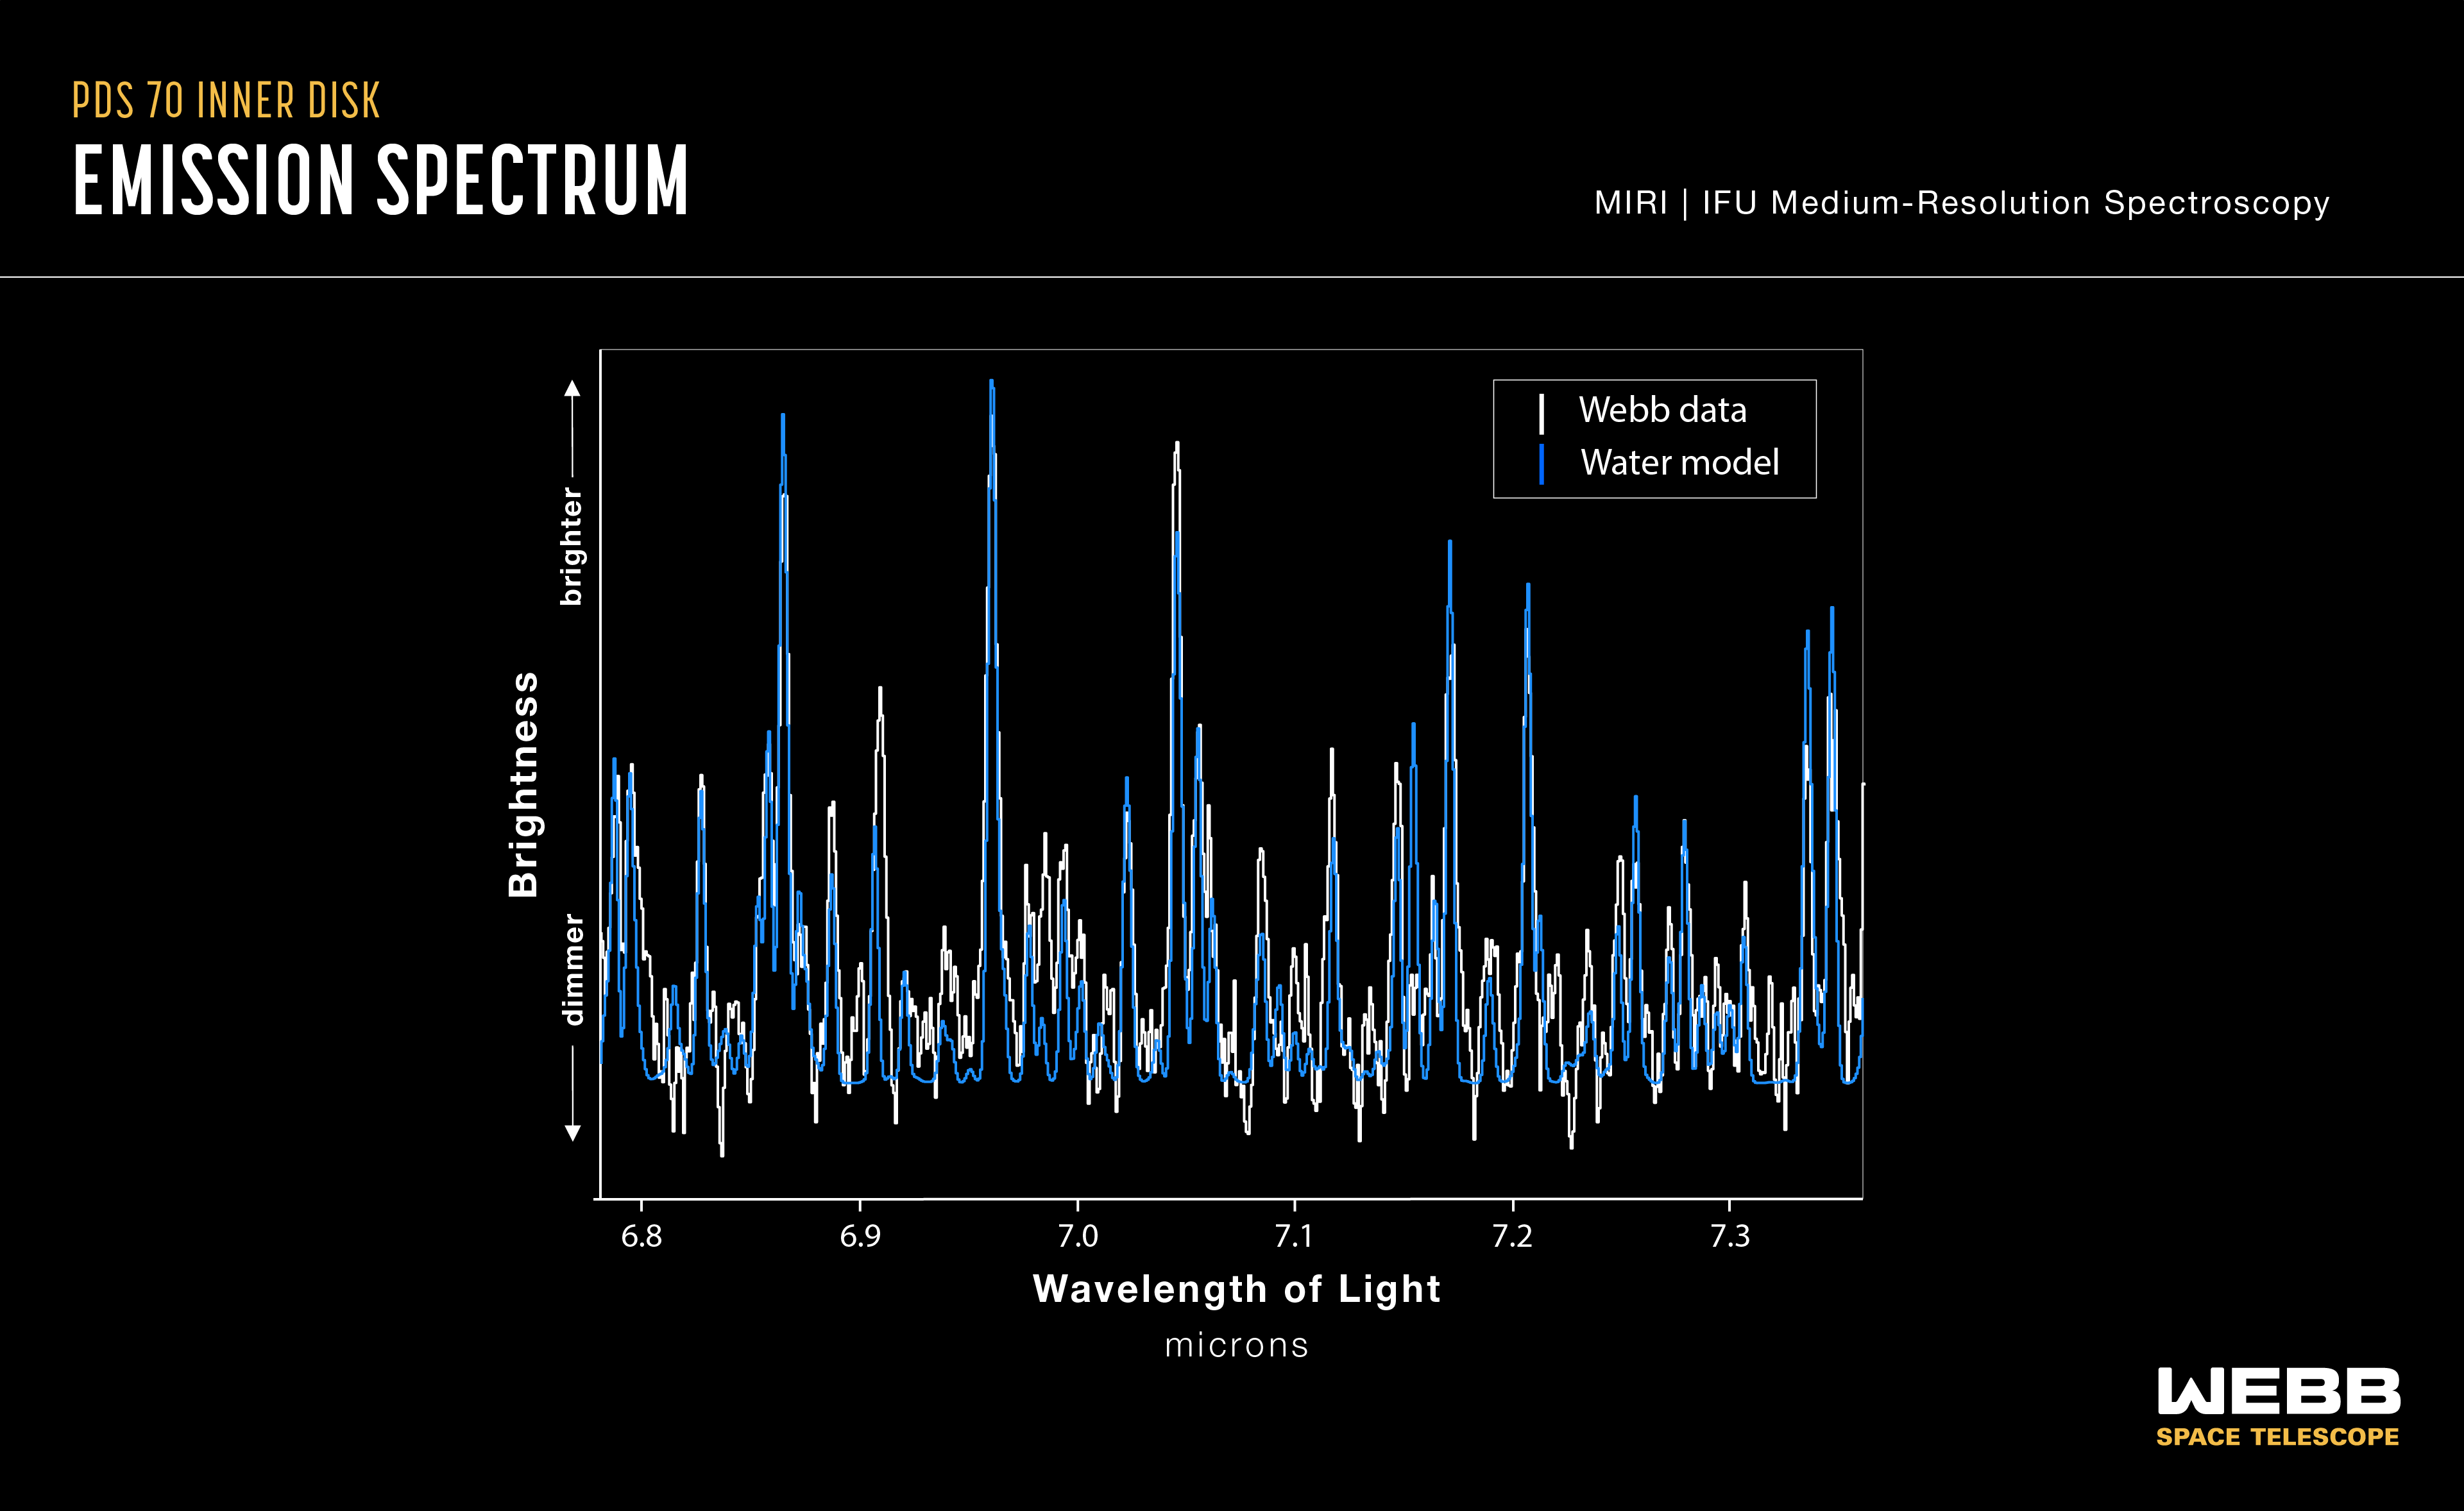

Water in protoplanetary disc of PDS 70 (MIRI emission spectrum)

New measurements from the NASA/ESA/CSA James Webb Space Telescope’s Mid-InfraRed Instrument (MIRI) have indicated the presence of water vapour in the inner disc of the system PDS 70, located 370 light-years away. This is the first detection of water in the terrestrial region of a disc already known to host two or more protoplanets.

This spectrum of the protoplanetary disk of PDS 70, obtained with Webb’s MIRI instrument, displays a number of emission lines from water vapour.

Credit: NASA, ESA, CSA, J. Olmsted (STScI)